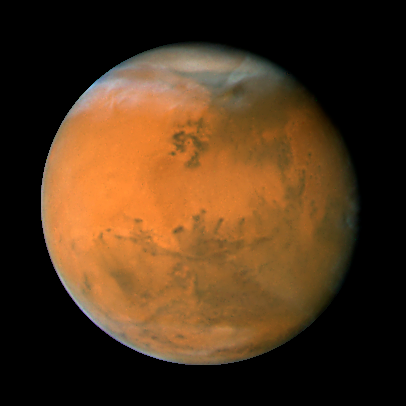

Mars on Dec. 1, 2007; longitude ~50 degrees

Mars observation taken Dec. 1, 07; longitude ~50 degrees

Credit: NASA, ESA, the Hubble Heritage Team (STScI/AURA), J. Bell (Cornell University), and M. Wolff (Space Science Institute, Boulder)